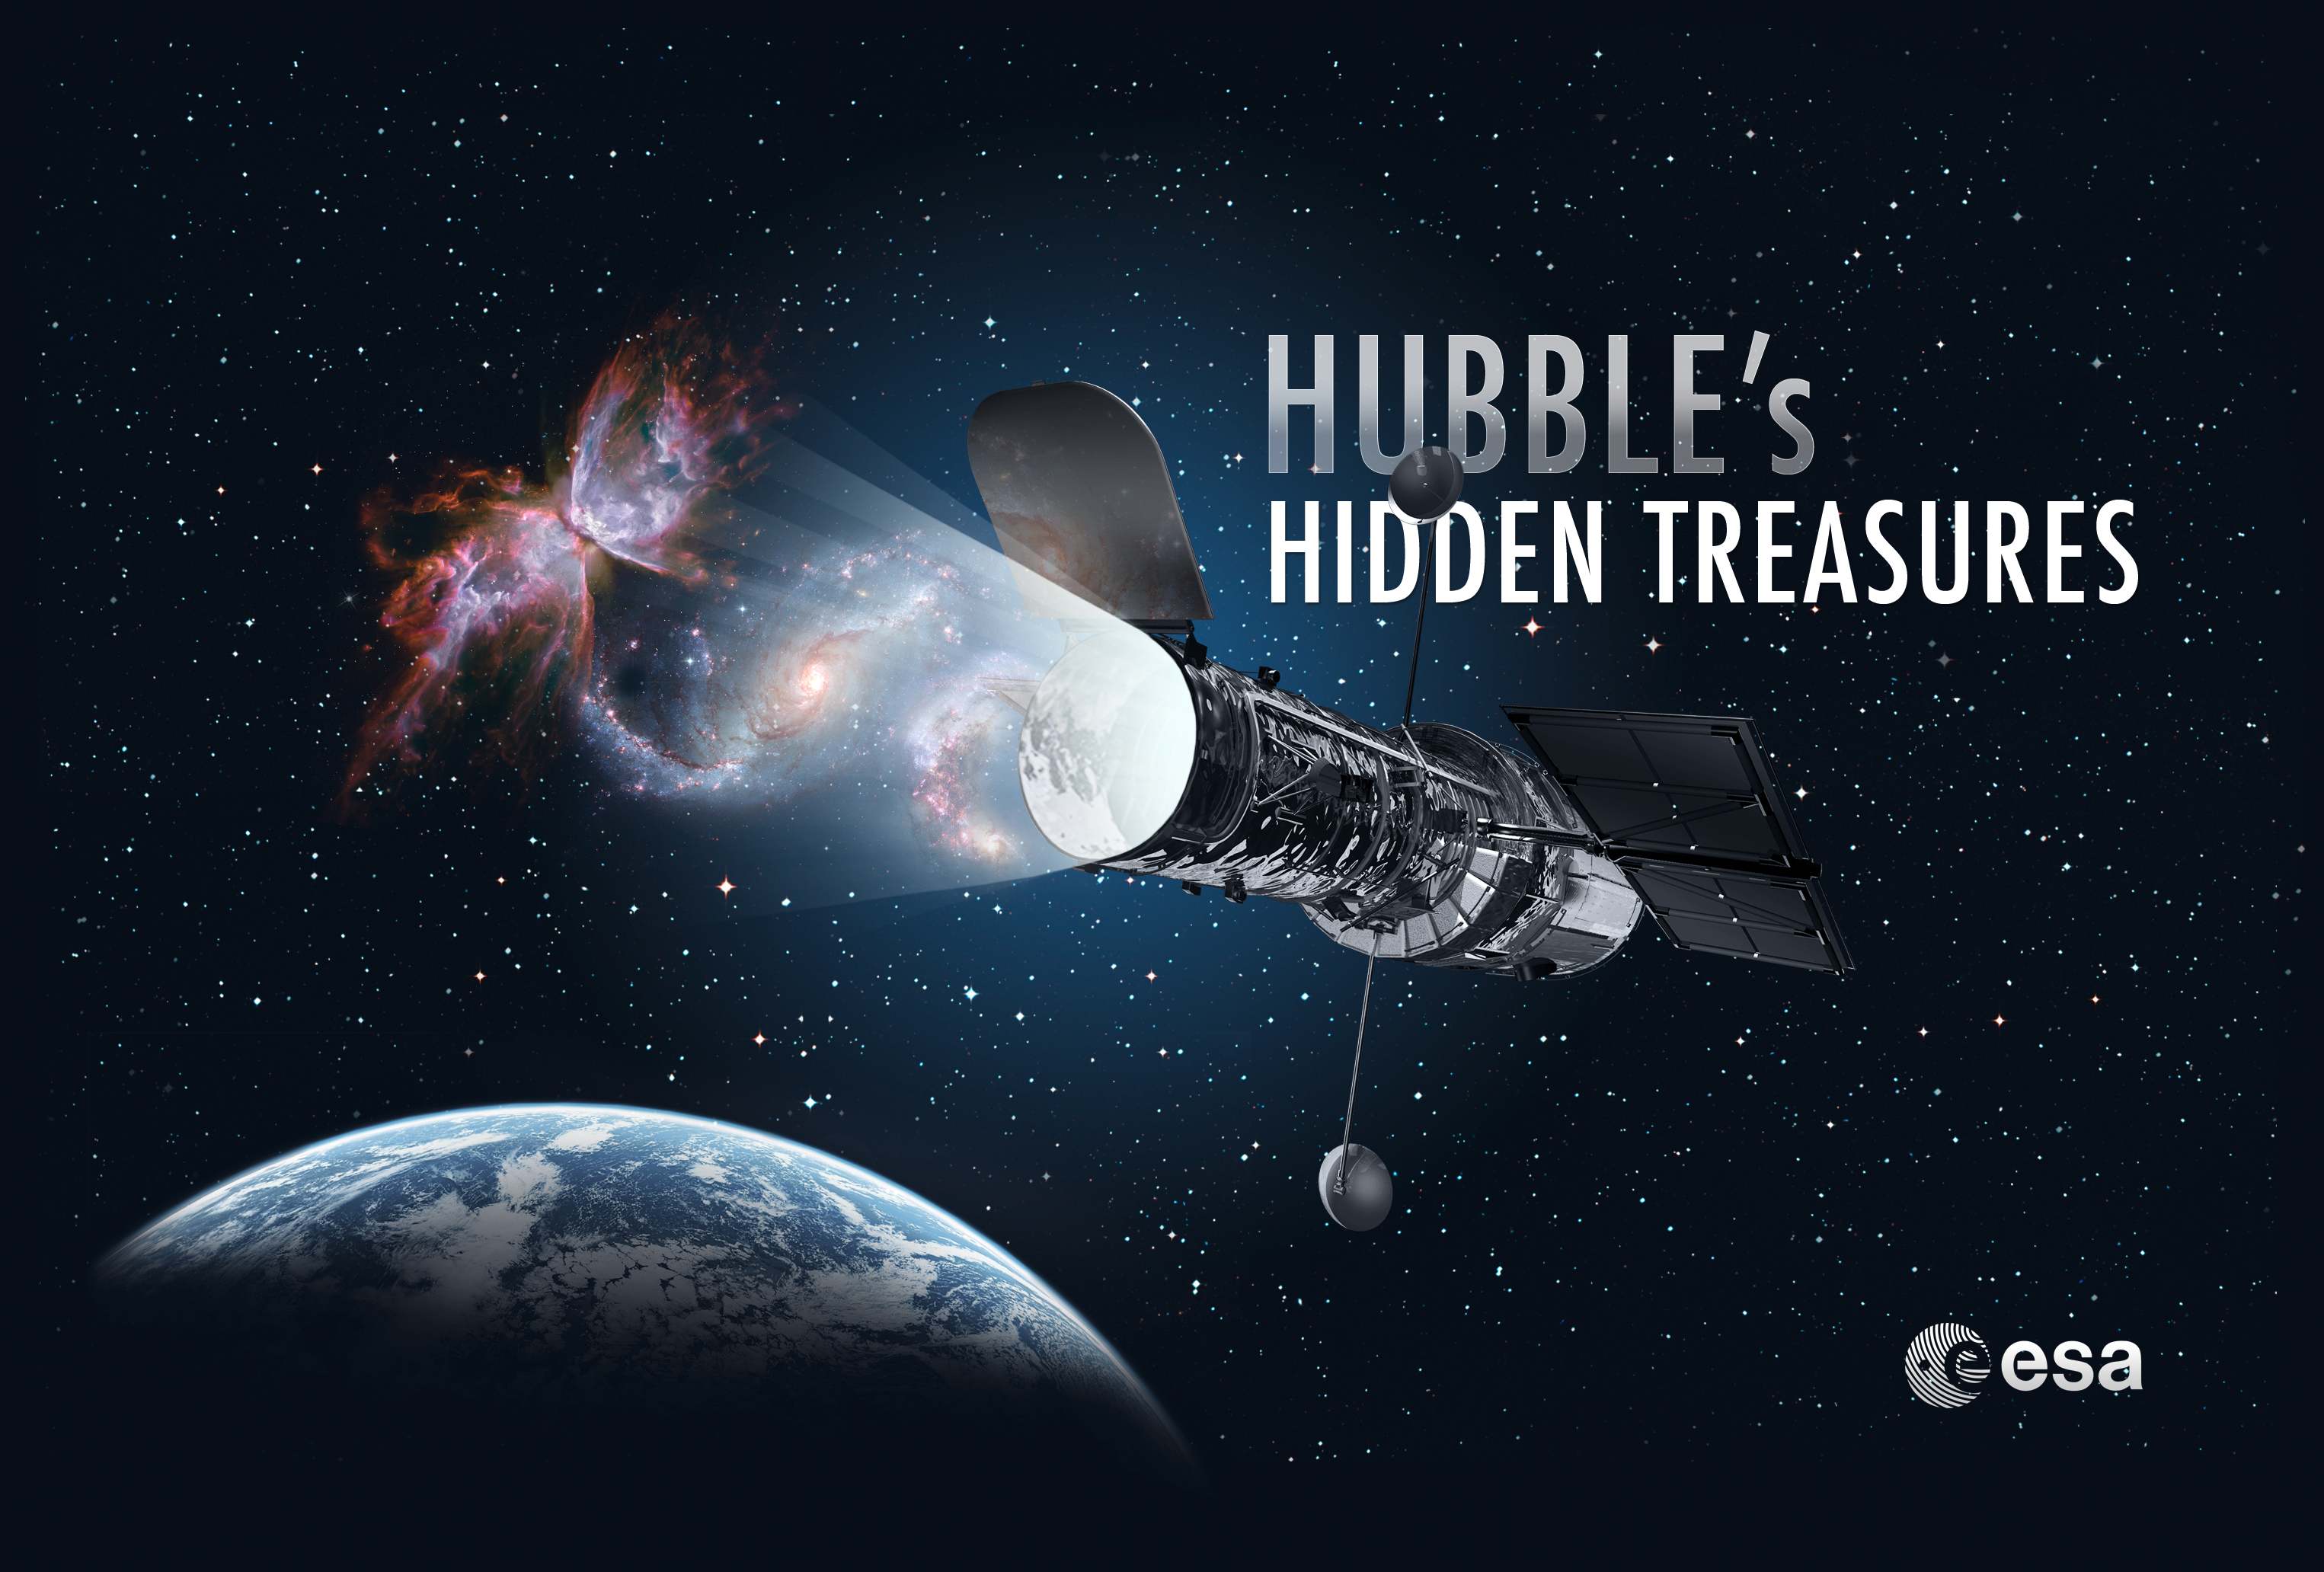

Hubble's Hidden Treasures

Hidden in Hubble’s huge data archives are still some truly breathtaking images that have never been seen in public. We call them Hubble’s Hidden Treasures — and we’re looking for your help to bring them to light. Visit the Hubble's Hidden Treasures website for more details.

Credit: NASA & ESA